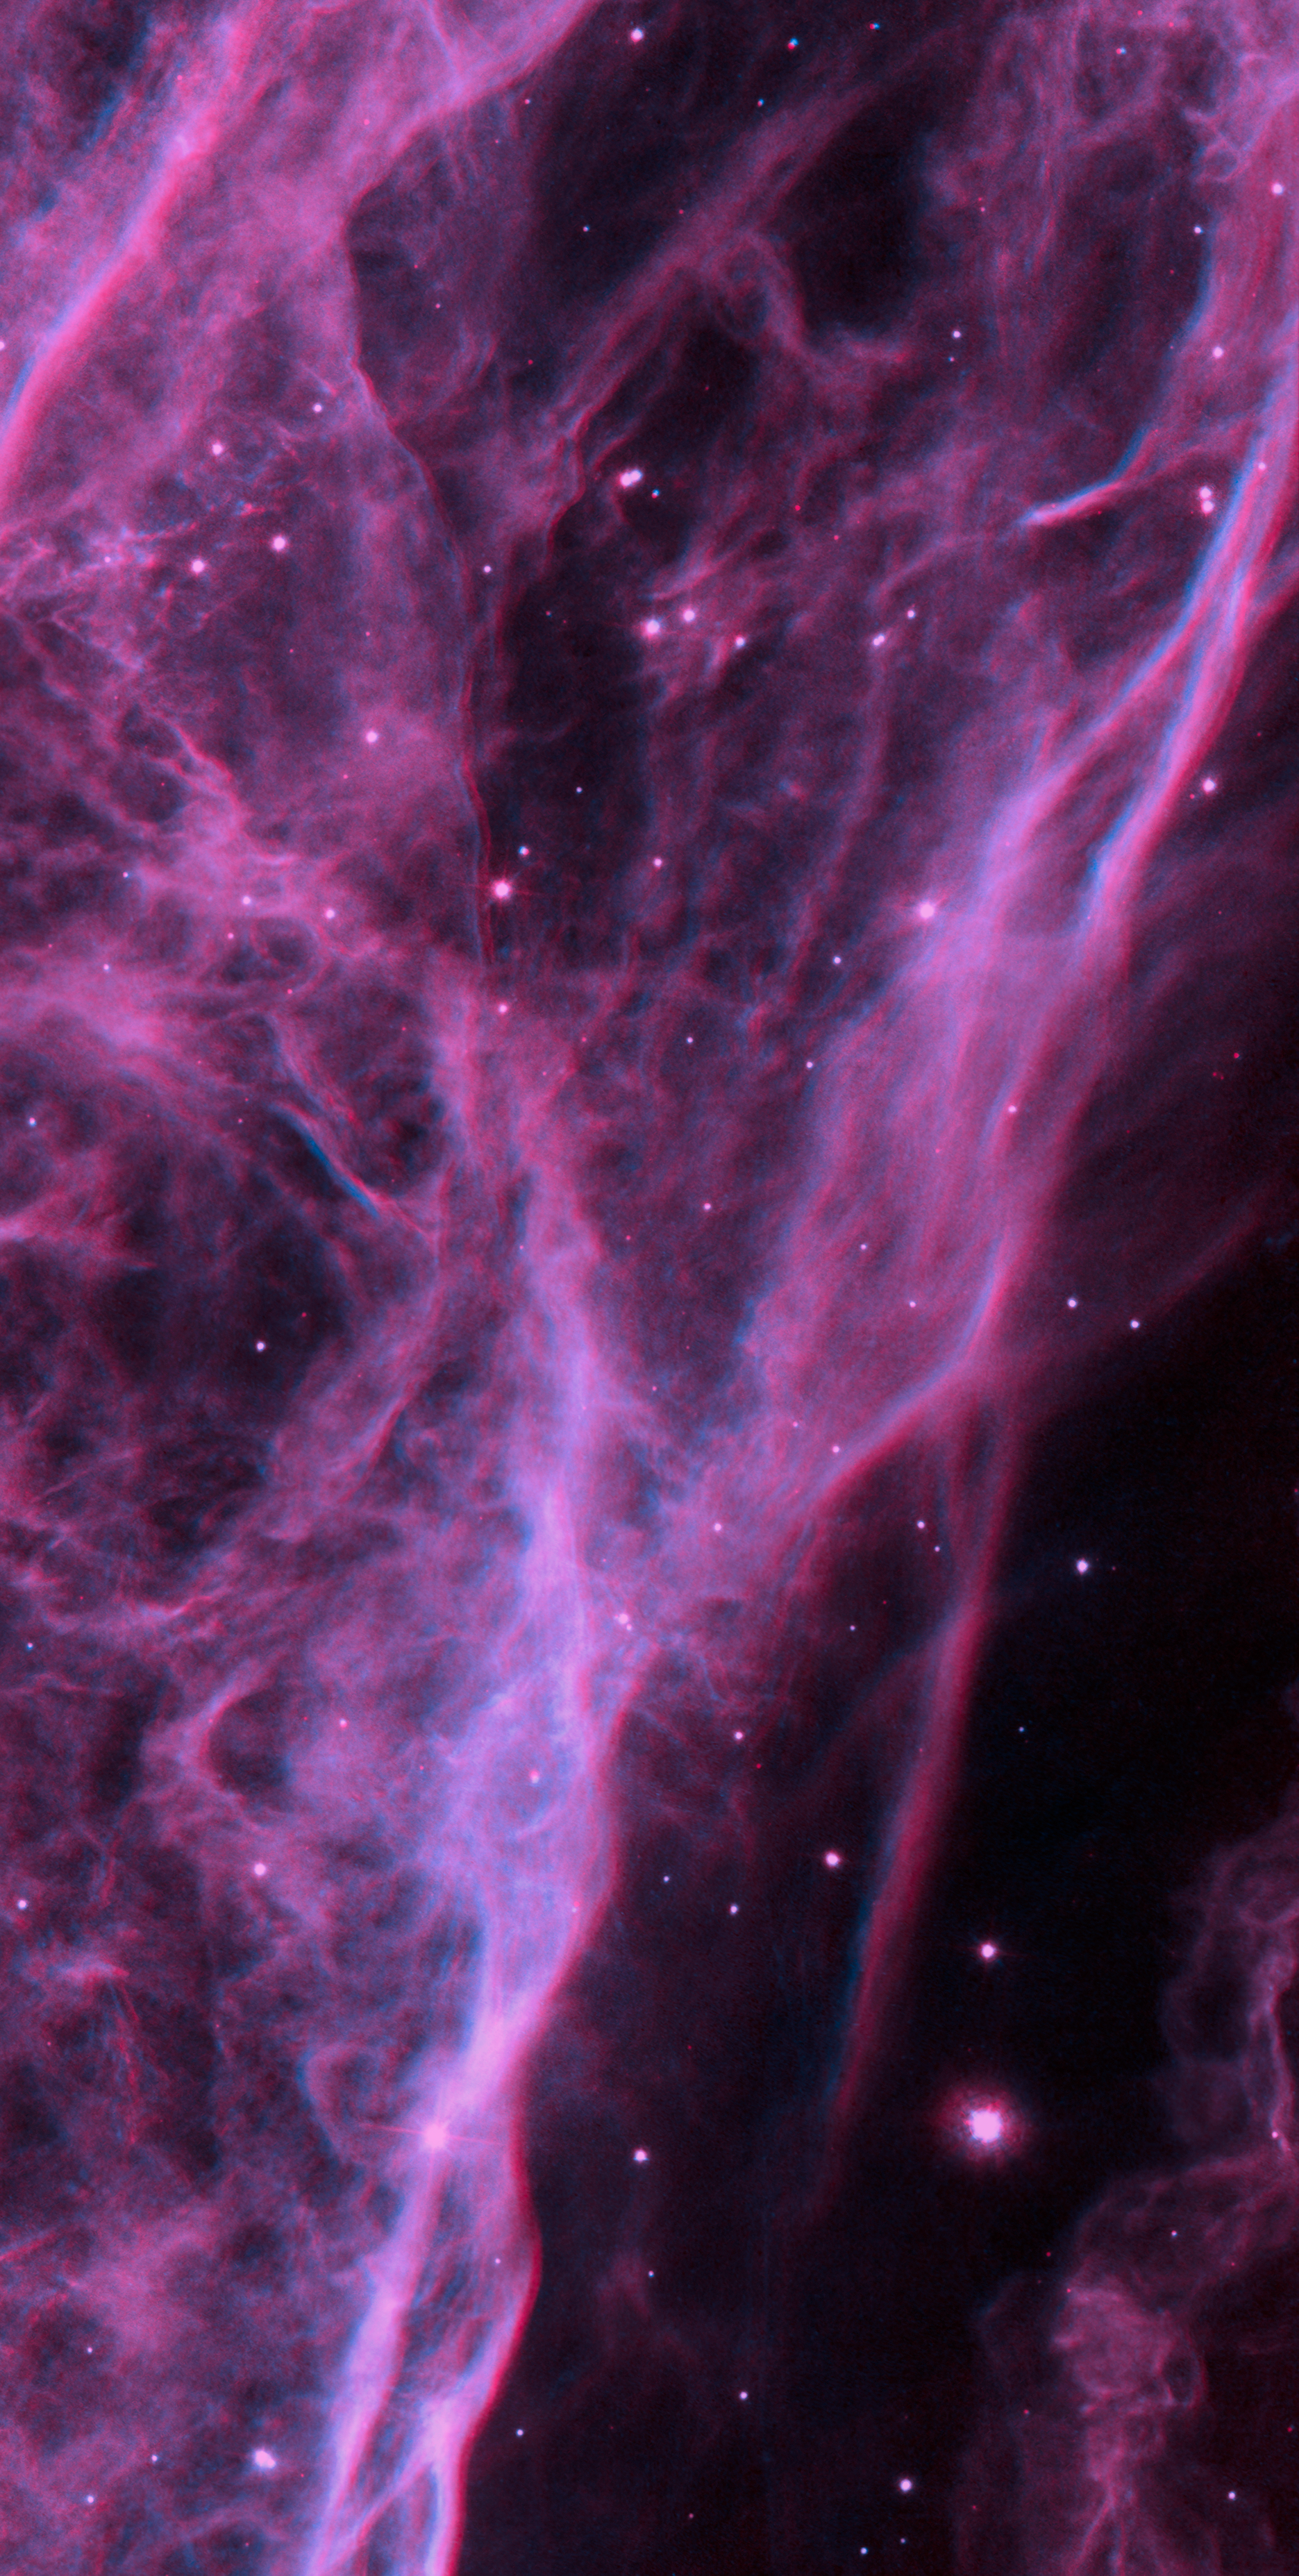

3D image of the Veil Nebula

Using red-blue glasses this image allows to see the Veil Nebula in 3D.

Credit: NASA, ESA, Hubble Heritage Team